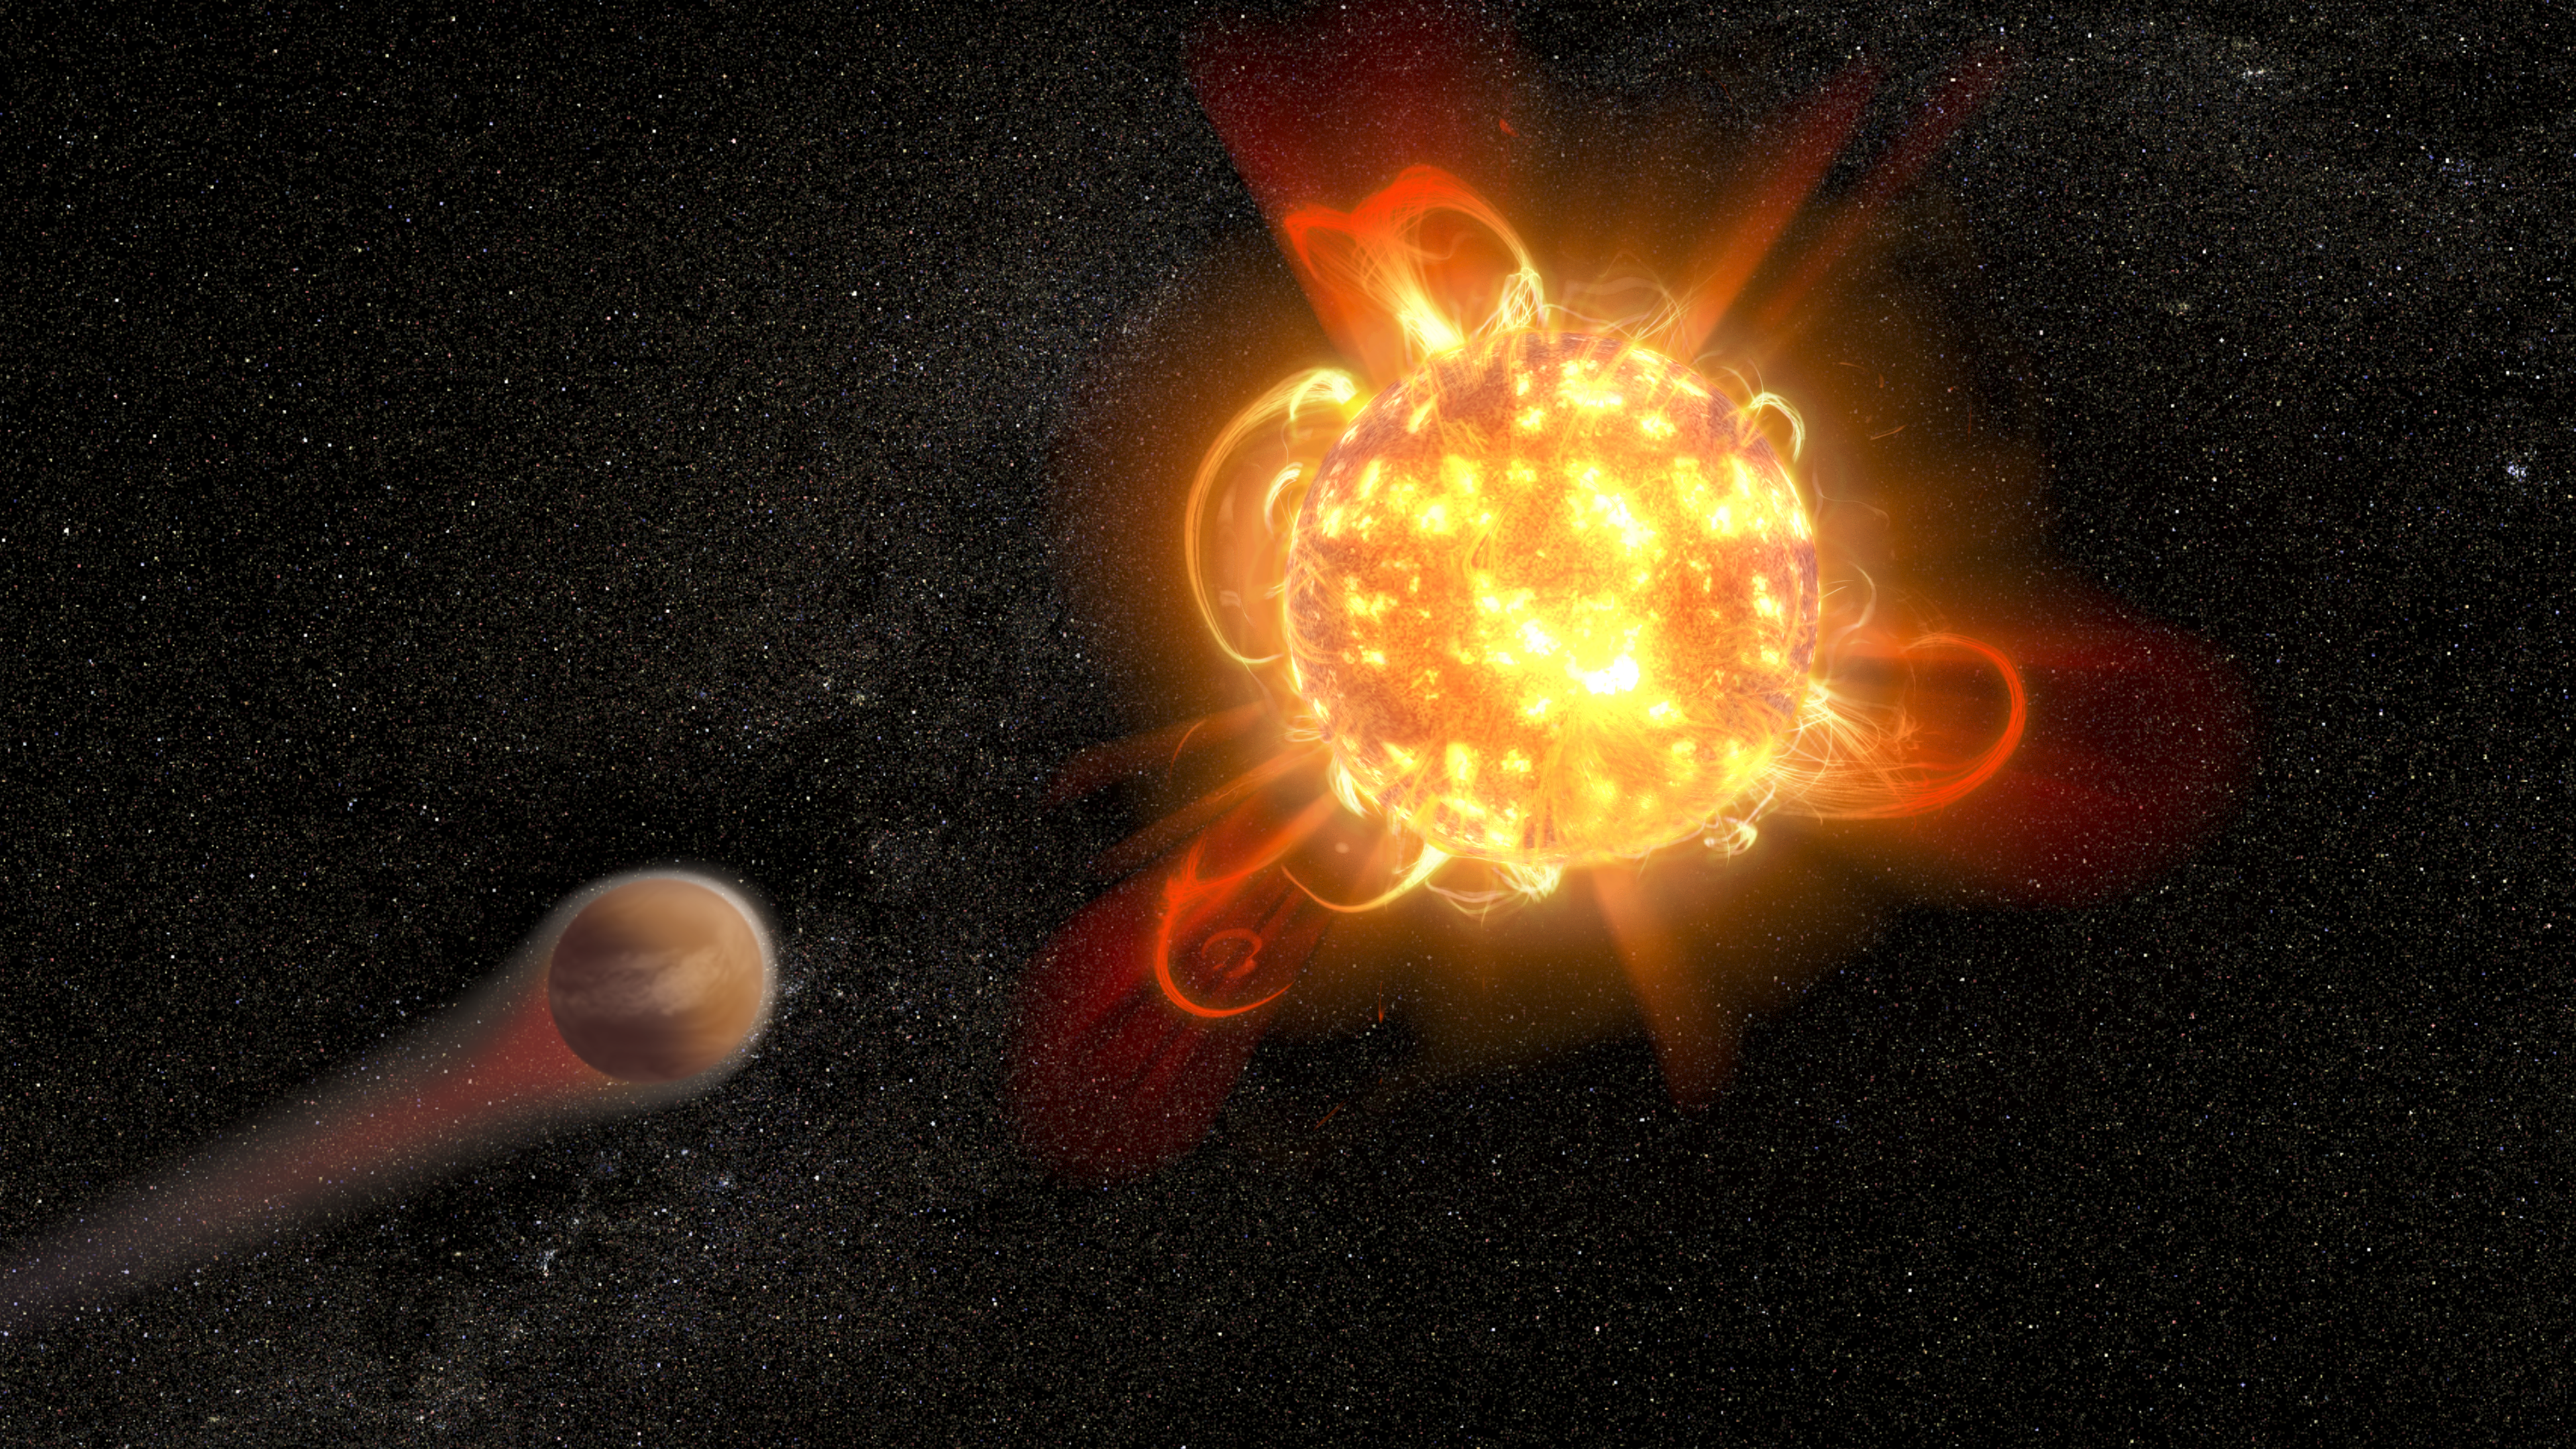

Artist's illustration of a young red dwarf stripping away a planet's atmosphere

Violent outbursts of seething gas from young red dwarf stars may make conditions uninhabitable on fledgling planets. In this artist's rendering, an active, young, red dwarf (right) is stripping the atmosphere from an orbiting planet (left). Scientists found that flares from the youngest red dwarfs they surveyed — approximately 40 million years old — are 100 to 1000 times more energetic than when the stars are older. They also detected one of the most intense stellar flares ever observed in ultraviolet light — more energetic than the most powerful flare ever recorded from our Sun.

Credit: NASA, ESA, and D. Player (STScI)